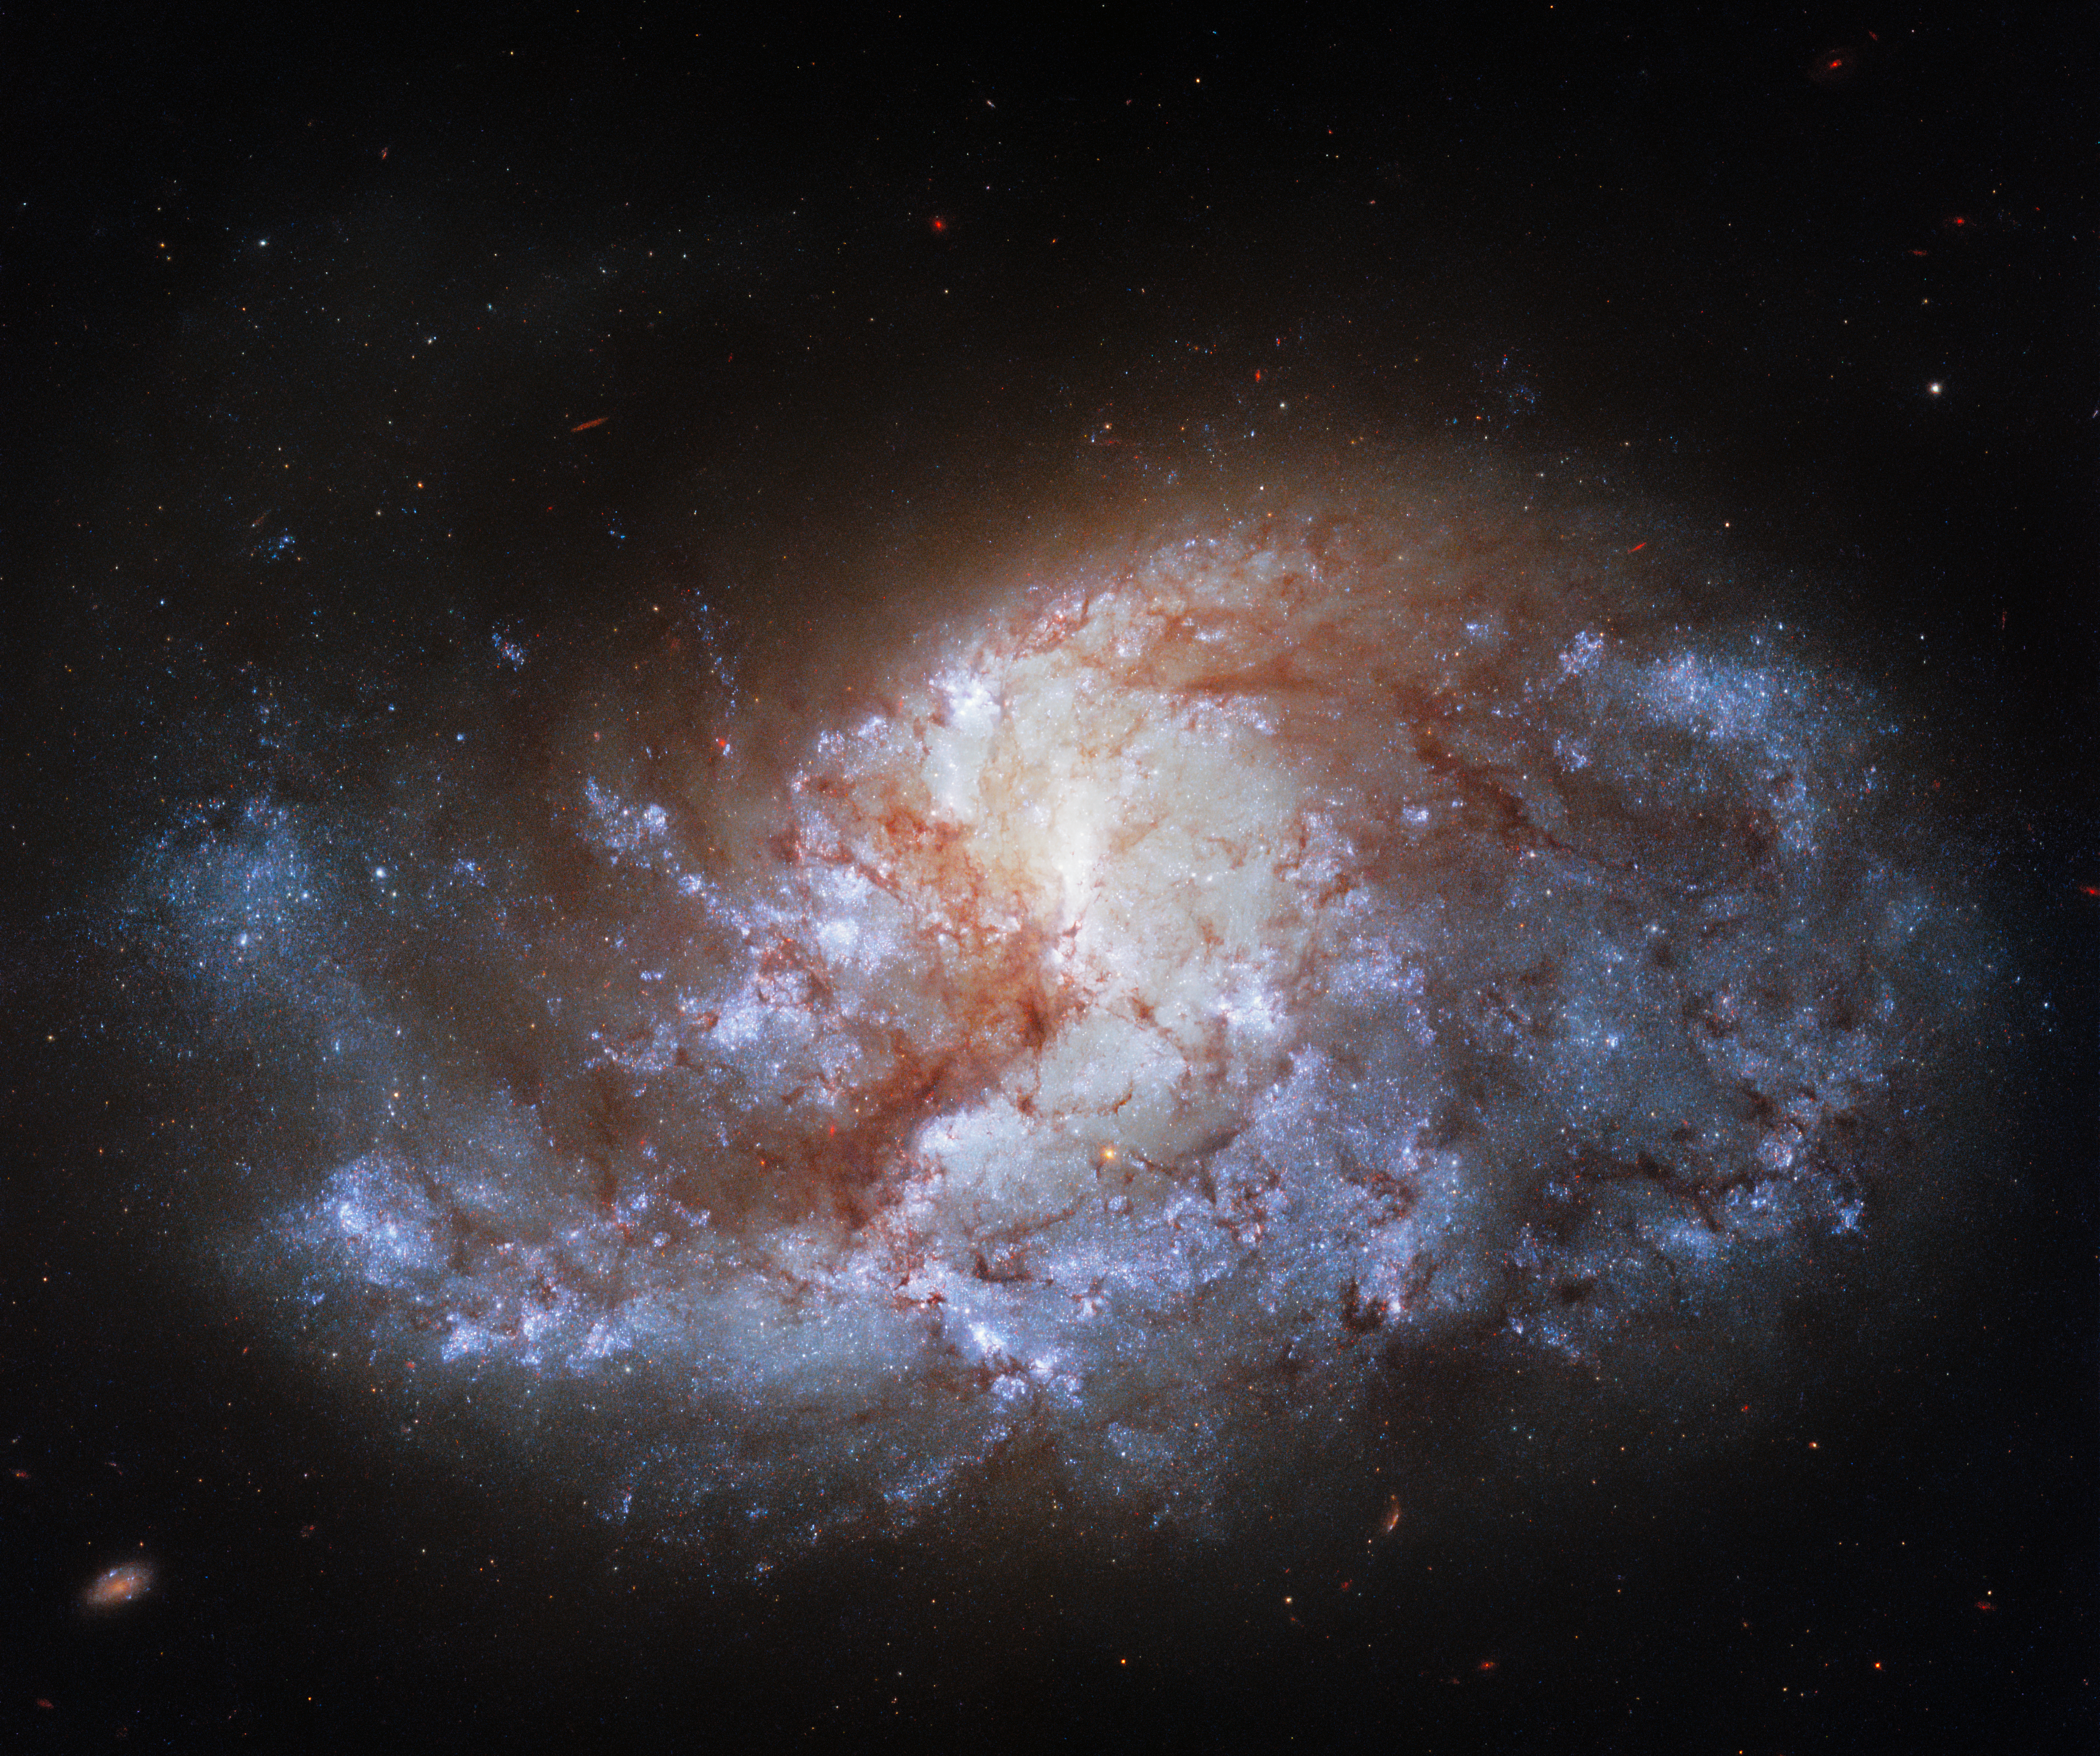

In the Heart of the Furnace

This jewel-bright image from the NASA/ESA Hubble Space Telescope shows NGC 1385, a spiral galaxy 30 million light-years away from Earth, which lies in the constellation Fornax. The image was taken with Hubble’s Wide Field Camera 3 (WFC3), which is often referred to as Hubble’s workhorse camera, thanks to its reliability and versatility. It was installed in 2009 when astronauts last visited Hubble, and 12 years later it remains remarkably productive.

NGC 1385’s home — the Fornax constellation — is not named after an animal or an ancient God, as are many of the other constellations. Fornax is simply the Latin word for a furnace. The constellation was named Fornax by Nicolas-Louis de Lacaille, a French astronomer who was born in 1713. Lacaiile named 14 of the 88 constellations that are still recognised today. He seems to have had a penchant for naming constellations after scientific instruments, including Atlia (the air pump), Norma (the ruler, or set square) and Telescopium (the telescope).

Credit: ESA/Hubble & NASA, J. Lee and the PHANGS-HST Team